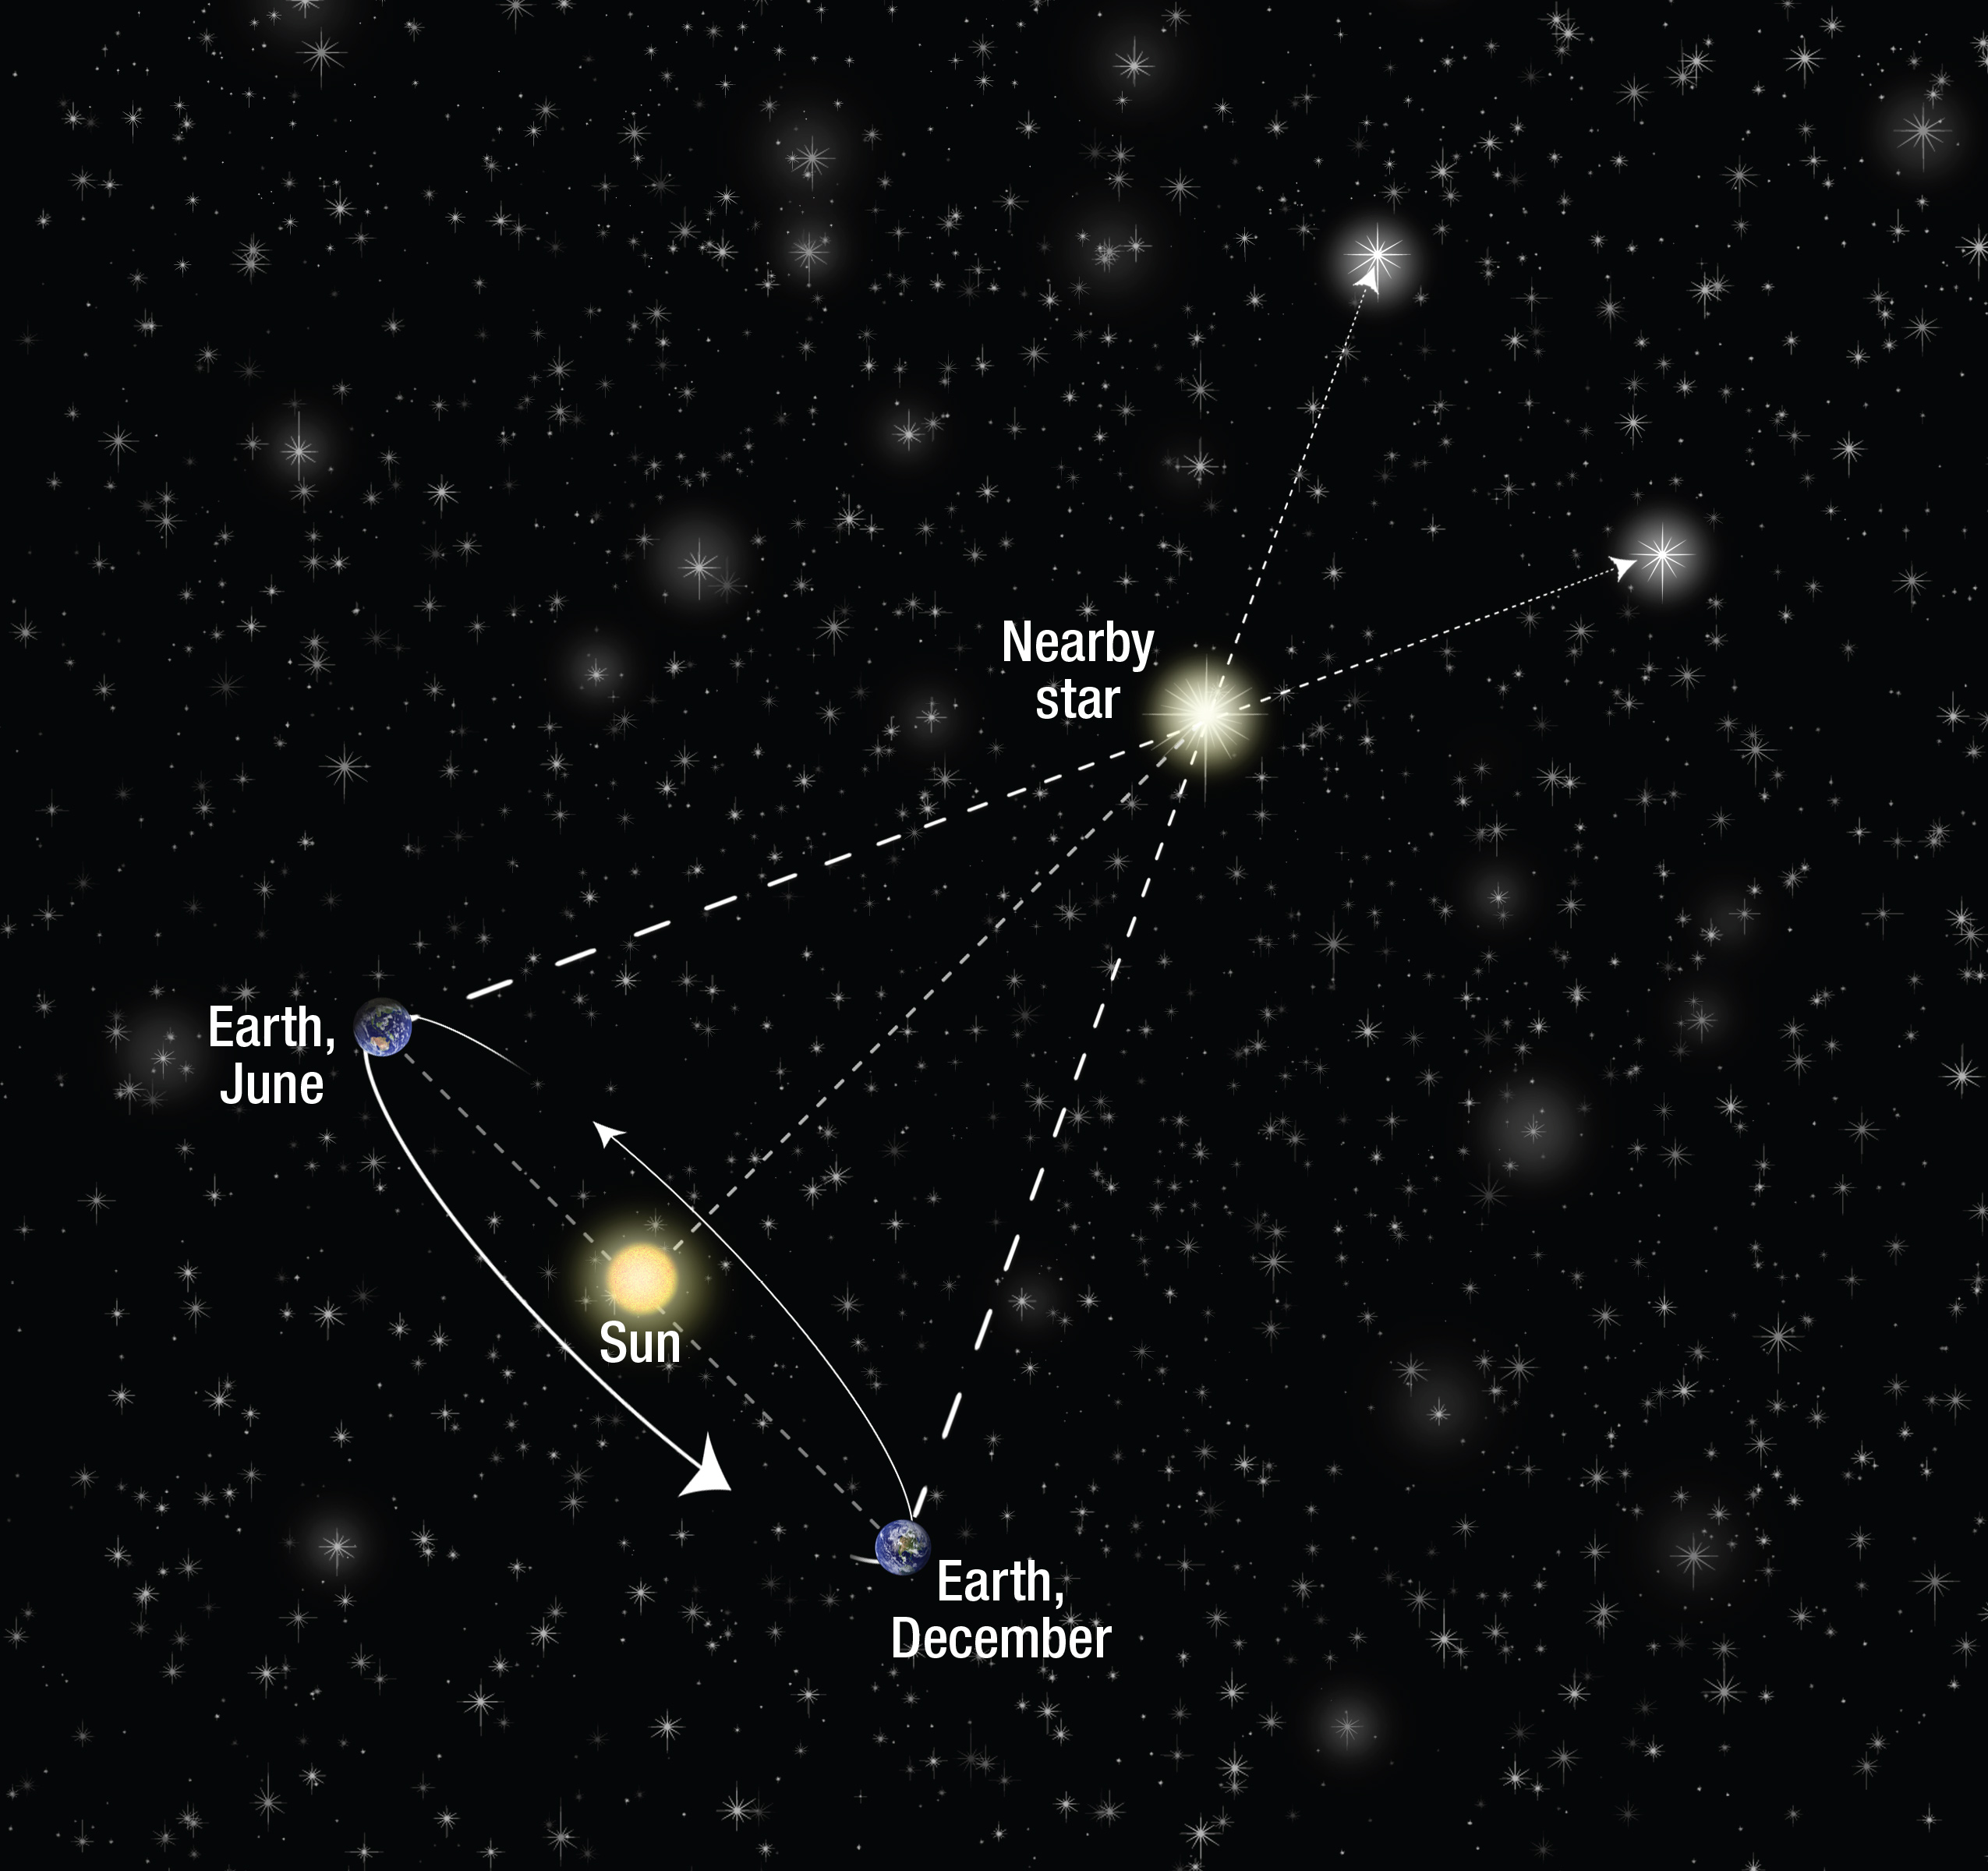

Stellar parallax

Distances to stars comparatively near to our Sun can be measured using a technique known as trigonometric parallax. This can only be done if the star is close enough to show an apparent shift in position relative to much more distant background stars, shown in the upper right of this image. This requires viewing the star on two different occasions, when Earth is on opposite sides of the Sun (seen lower left).

Telescopes like Hubble can then precisely measure the very small angular displacement of the star between observations. When this value is combined using geometry with the value for Earth's orbital diameter, a precise distance can be calculated. Land surveyors commonly
use this triangulation technique.

Credit: NASA, ESA, and A. Feild (STScI)